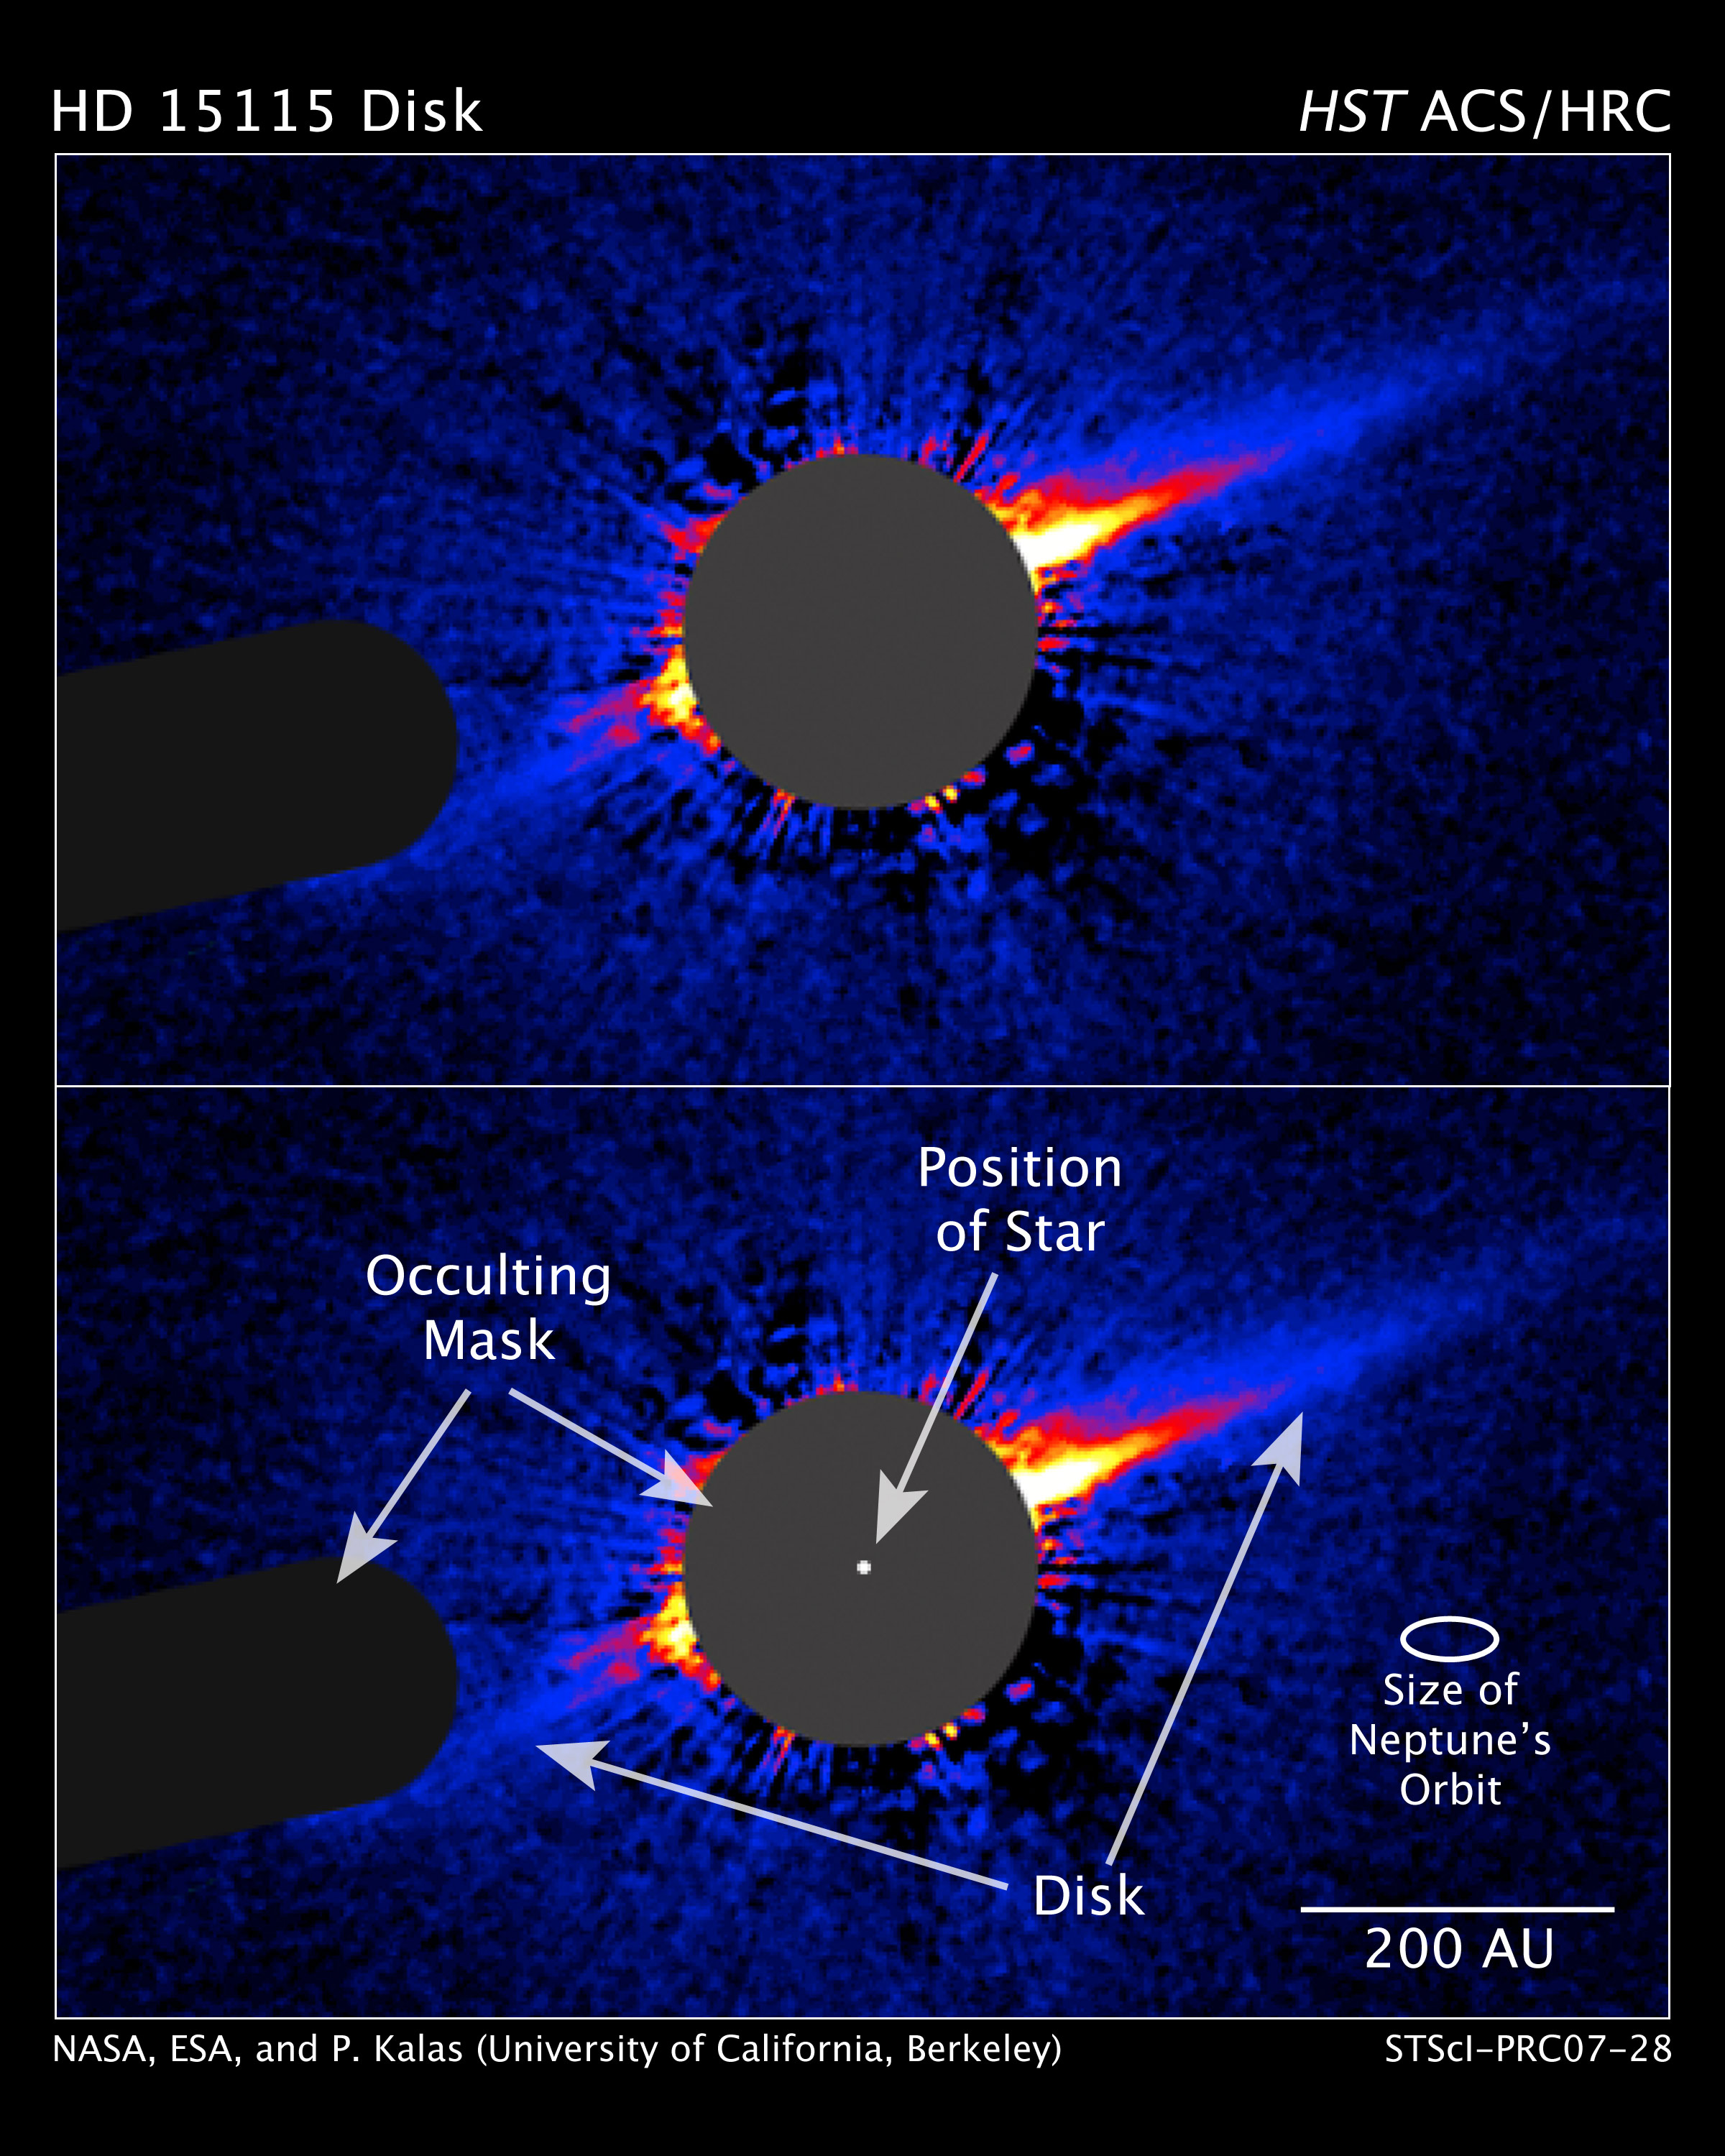

Hubble Reveals Lopsided Debris Disk Around Star

This image taken by NASA/ESA Hubble Space Telescope shows a lopsided debris disk around the young star HD 15115.

The disk, seen edge-on, is the dense blue line extending from the star to the upper right and lower left of the image. As seen from Earth, the edge-on disk resembles a needle sticking out from the star. The disk appears thicker and longer at upper right than at lower left, evidence of the disk's lopsided structure.

Credit: NASA, ESA, and P. Kalas (University of California, Berkeley)